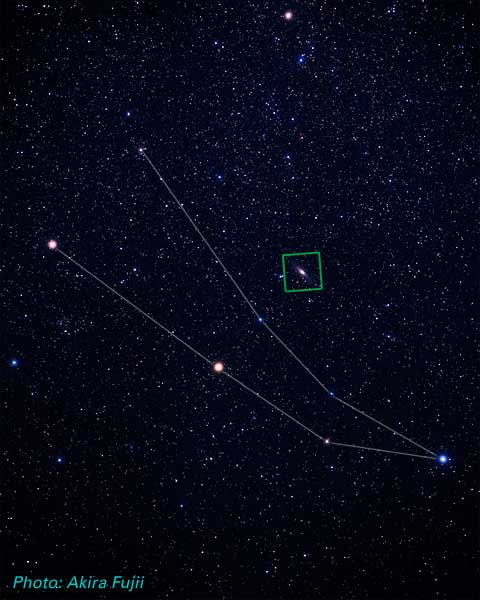

Location of M31 in Andromeda (ground-based image)

This image shows the location of M31 (the Andromeda Galaxy) in the constellation Andromeda. The image is referring to a large series of M31 images taken with Hubble's Advanced Camera for Surveys (ACS).

Credit: Akira Fujii